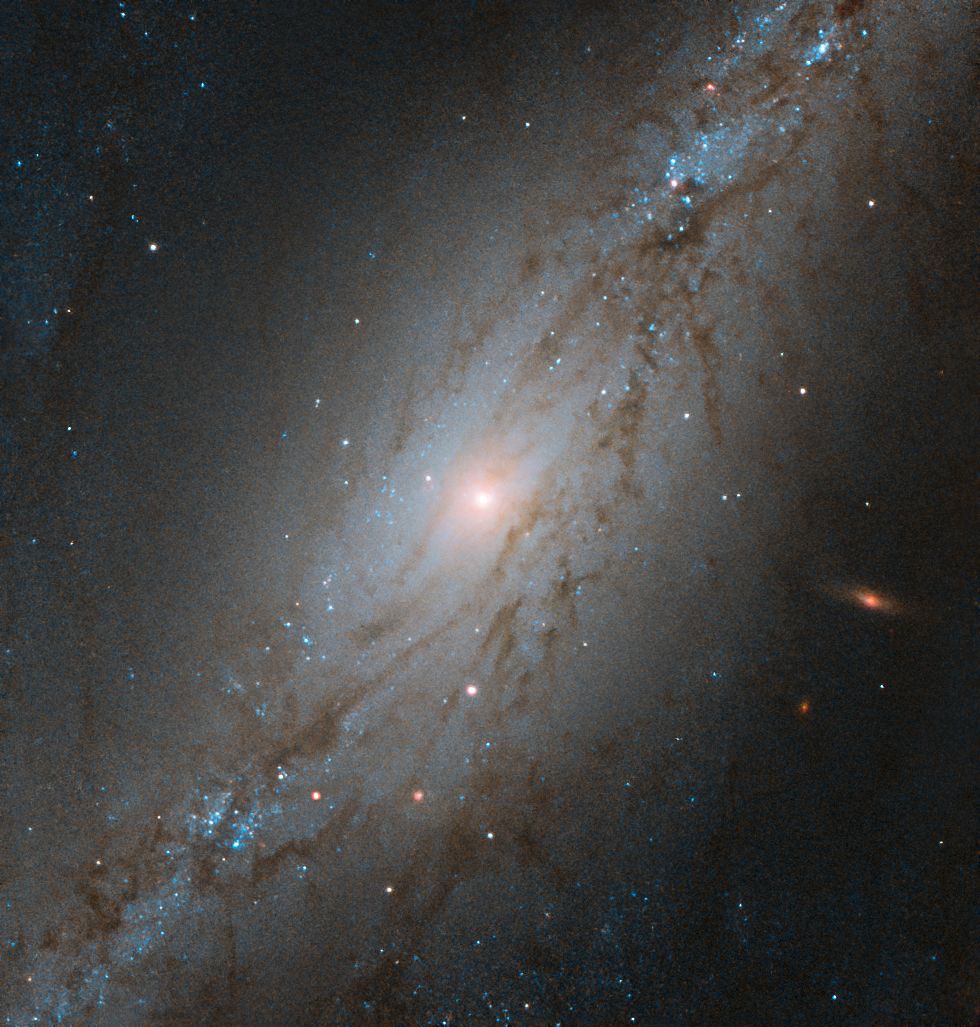

The Sculpted Galaxy

Captured by the NASA/ESA Hubble Space Telescope, this image shows NGC 7513, a barred spiral galaxy. Located approximately 60 million light-years away, NGC 7513 lies within the Sculptor constellation in the southern hemisphere.

This galaxy is moving at the astounding speed of 1564 kilometres per second, and it is heading away from us. For context, the Earth orbits the Sun at about 30 kilometres per second. Though NGC 7513’s apparent movement away from the Milky Way might seem strange, it is not that unusual.

While some galaxies, like the Milky Way and the Andromeda galaxy, are caught in each other’s gravitational pull and will eventually merge together, the vast majority of galaxies in our Universe appear to be moving away from each other. This phenomenon is due to the expansion of the Universe, and it is the space between galaxies that is stretching, rather than the galaxies themselves moving.

Credit: ESA/Hubble & NASA, M. Stiavelli, P. Erwin et al.